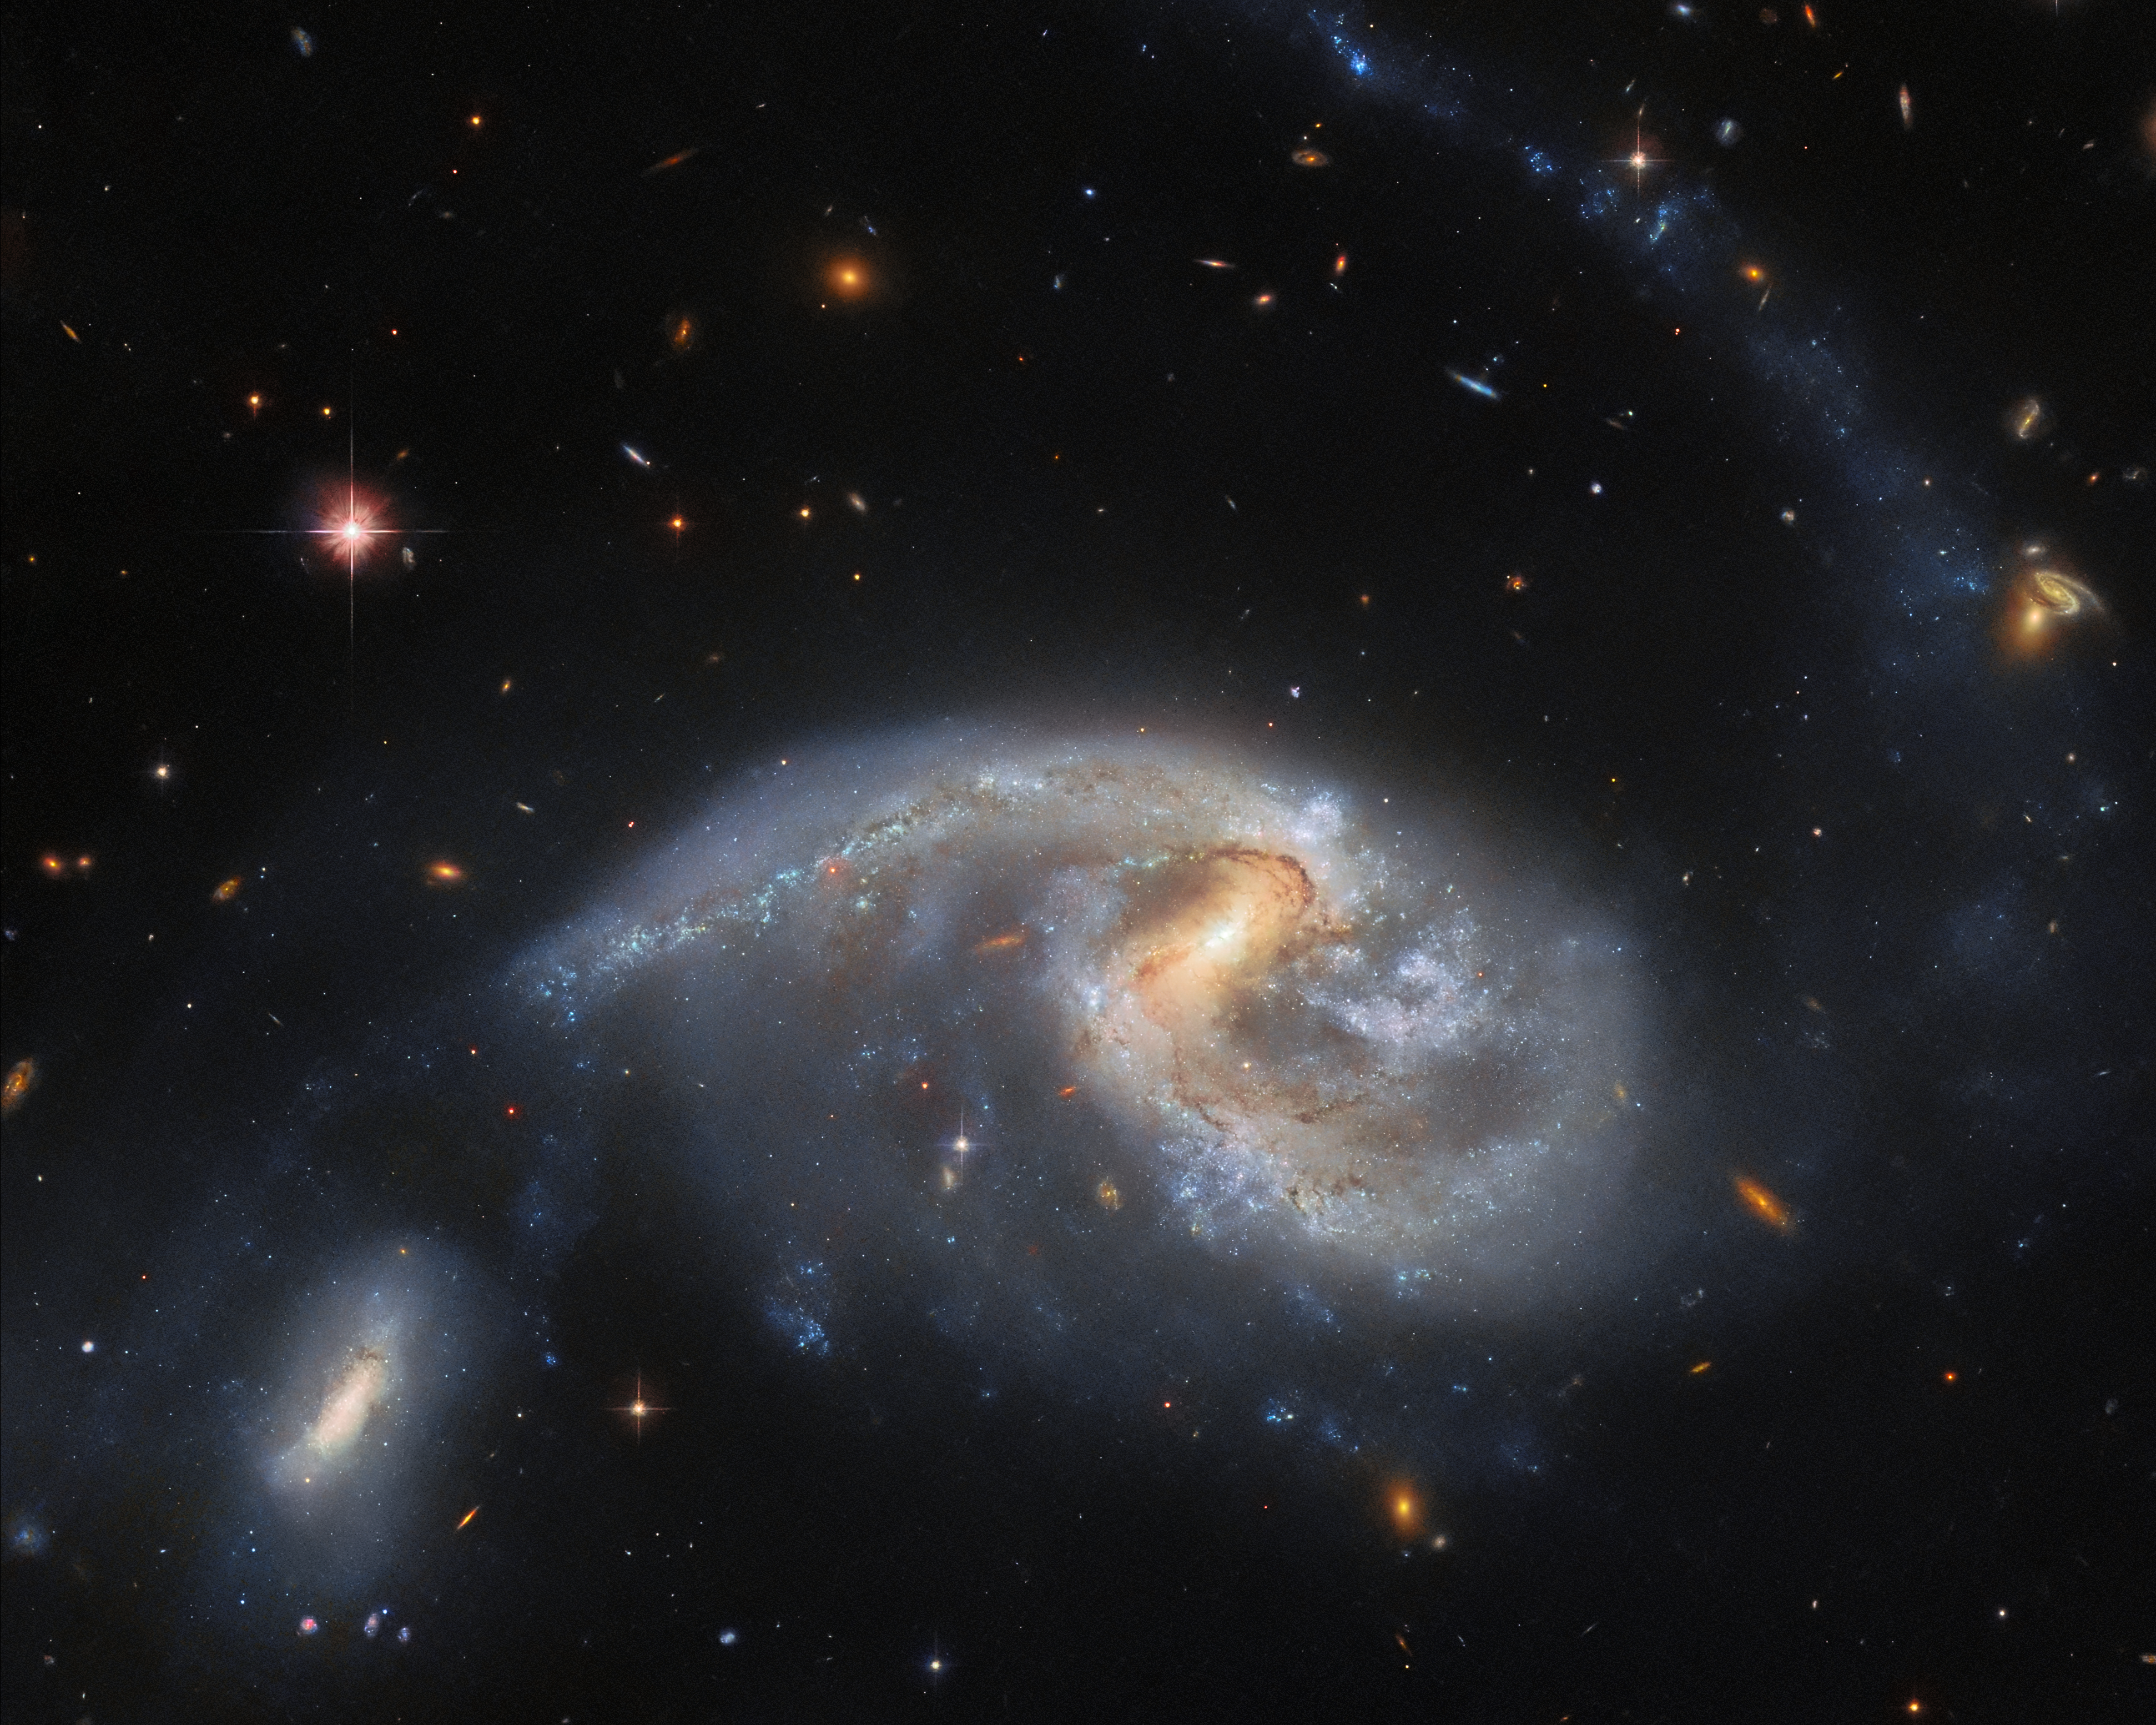

Two’s company

This image features Arp 72, a very selective galaxy group that only includes two interacting galaxies: NGC 5996 (the large spiral galaxy) and NGC 5994 (its smaller companion, in the lower left of the image). Both galaxies lie approximately 160 million light-years from Earth, and their cores are separated from each other by a distance of around 67 thousand light-years. Moreover, the distance between the galaxies at their closest points is even smaller, closer to 40 thousand light-years. Whilst this might still sound vast, in galactic separation terms it is really very cosy! For comparison, the distance between the Milky Way and its nearest independent galactic neighbour Andromeda is around 2.5 million light-years. Alternatively, the distance between the Milky Way and its largest and brightest satellite galaxy, the Large Magellanic Cloud (satellite galaxies are galaxies that are bound in orbit around another galaxy), is about 162 thousand light-years.

Given this, coupled with the fact that NGC 5996 is roughly comparable in size to the Milky Way, it is not surprising that NGC 5996 and NGC 5994 — apparently separated by only 40 thousand light-years or so — are interacting with one another. In fact, the interaction might be what has caused the spiral shape of NGC 5996 to distort and apparently be drawn in the direction of NGC 5994. It also prompted the formation of the very long and faint tail of stars and gas curving away from NGC 5996, up to the top right of the image. This ‘tidal tail’ is a common phenomenon that appears when galaxies get in close together, as can be seen in several Hubble images.

Credit: ESA/Hubble & NASA, L. Galbany, J. Dalcanton, Dark Energy Survey/DOE/FNAL/DECam/CTIO/NOIRLab/NSF/AURA